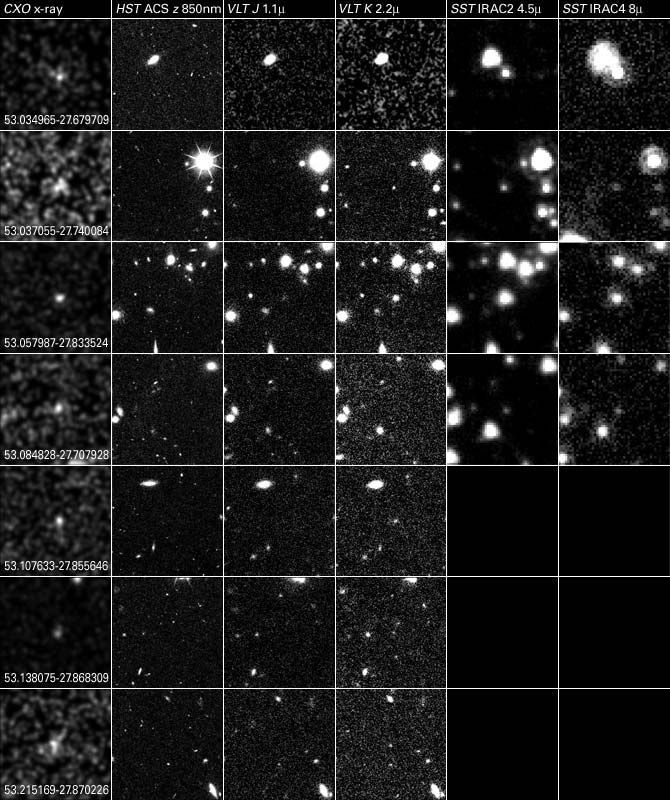

Comparison of 7 AGN observed with Chandra, Hubble, VLT and Spitzer

The combined power of NASA's Great Observatories - the Hubble Space Telescope, the Chandra X-ray Observatory, and the Spitzer Space Telescope - have been combined to find a hidden population of supermassive black holes in the universe. It took the penetrating view of Spitzer to finally uncover the black holes and their surrounding galaxies.

Credit: NASA, ESA, A. M. Koekemoer (STScI), M. Dickinson (NOAO) and The GOODS Team